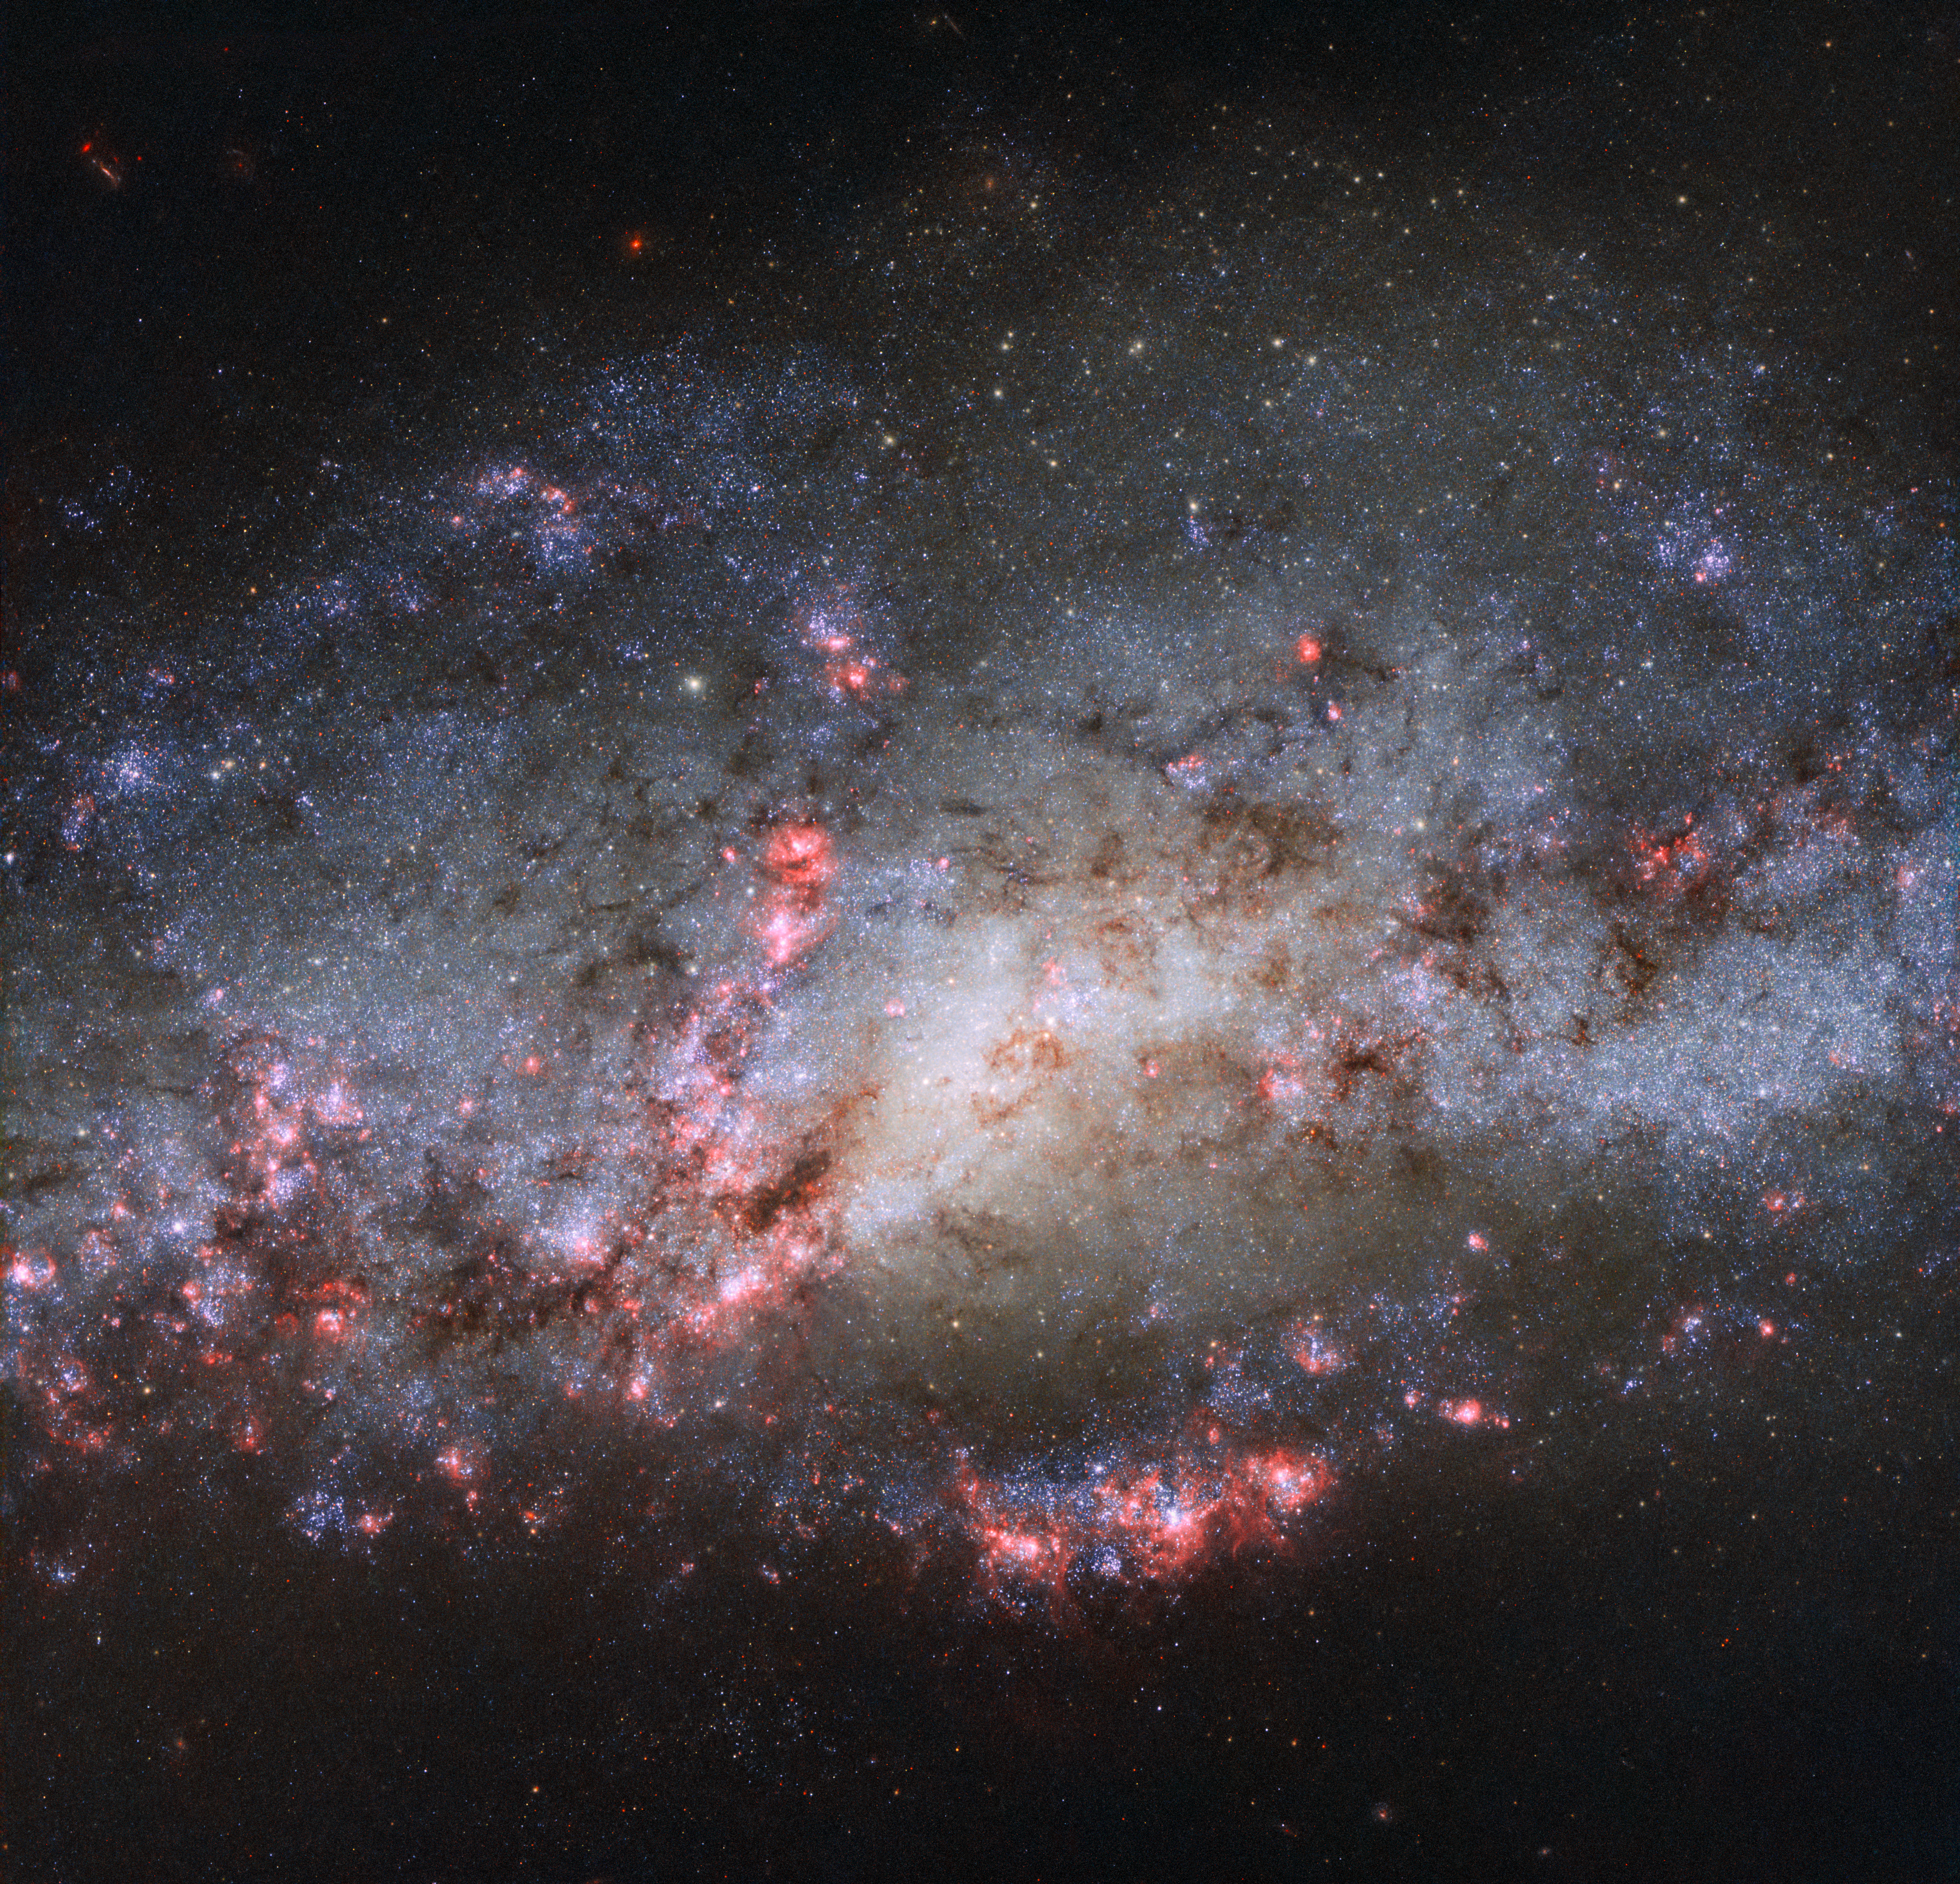

Result of a galactic crash

This image, taken with the NASA/ESA Hubble Space Telescope, shows the galaxy NGC 4490. The scattered and warped appearance of the galaxy are the result of a past cosmic collision with another galaxy, NGC 4485 (not visible in this image).

The extreme tidal forces of the interaction between the two galaxies have carved out the shapes and properties of NGC 4490. Once a barred spiral galaxy, the outlying regions of NGC 4490 have been stretched out, resulting in its nickname of the Cocoon Galaxy.

Credit: ESA/Hubble & NASA
Acknowledgements: D. Calzetti (UMass) and the LEGUS Team, J. Maund (University of Sheffield), and R. Chandar (University of Toledo)